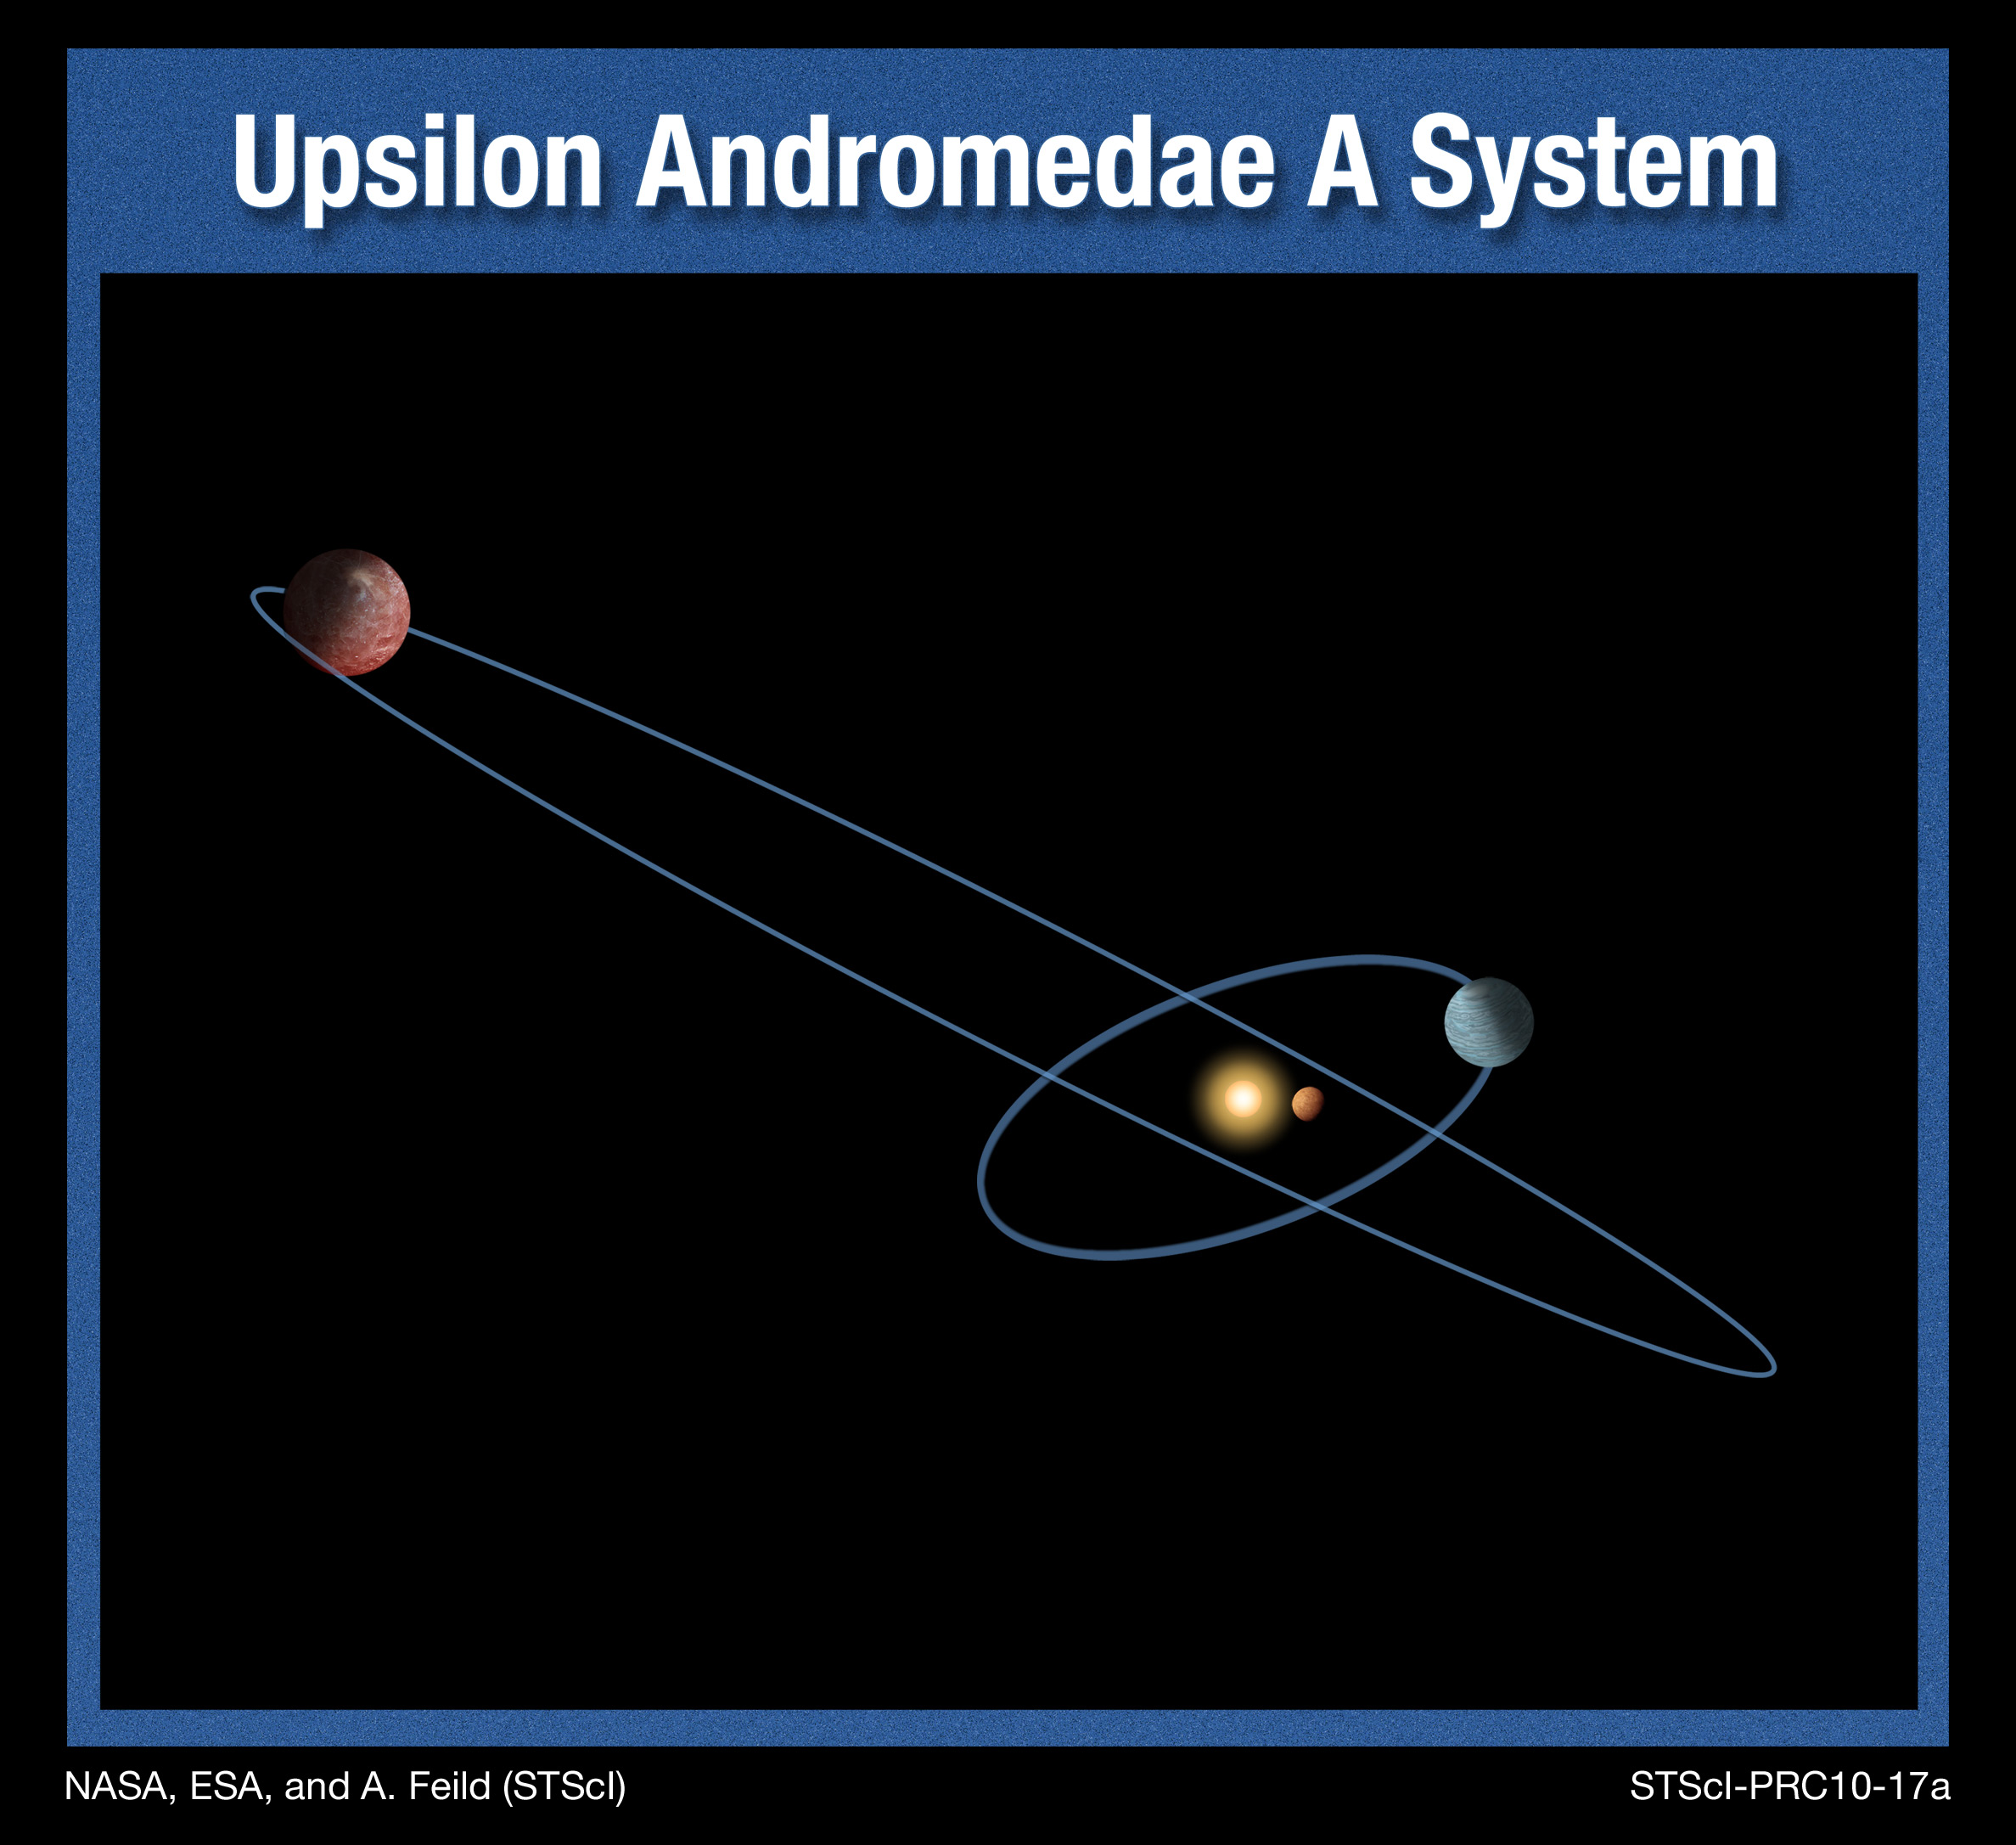

Upsilon Andromedae A system (artist's impression)

This is an artist's illustration of the Upsilon Andromedae A planetary system, where three Jupiter-type planets orbit the yellow-white star Upsilon Andromedae A. Astronomers have recently discovered that not all planets orbit this star in the same plane, as the major planets in our Solar System orbit the Sun. The orbits of two of the planets are inclined by 30 degrees with respect to each other. Such a strange orientation has never before been seen in any other planetary system. This surprising finding will impact theories of how planetary systems form and evolve, say researchers. It suggests that some violent events can happen to disrupt planets' orbits after a planetary system forms. The discovery was made by joint observations with the Hubble Space Telescope, the Hobby-Eberly Telescope, and other ground-based telescopes.

Credit: NASA, ESA, and A. Feild (STScI). Science Credit: NASA, ESA, and B. McArthur (The University of Texas at Austin, McDonald Observatory)